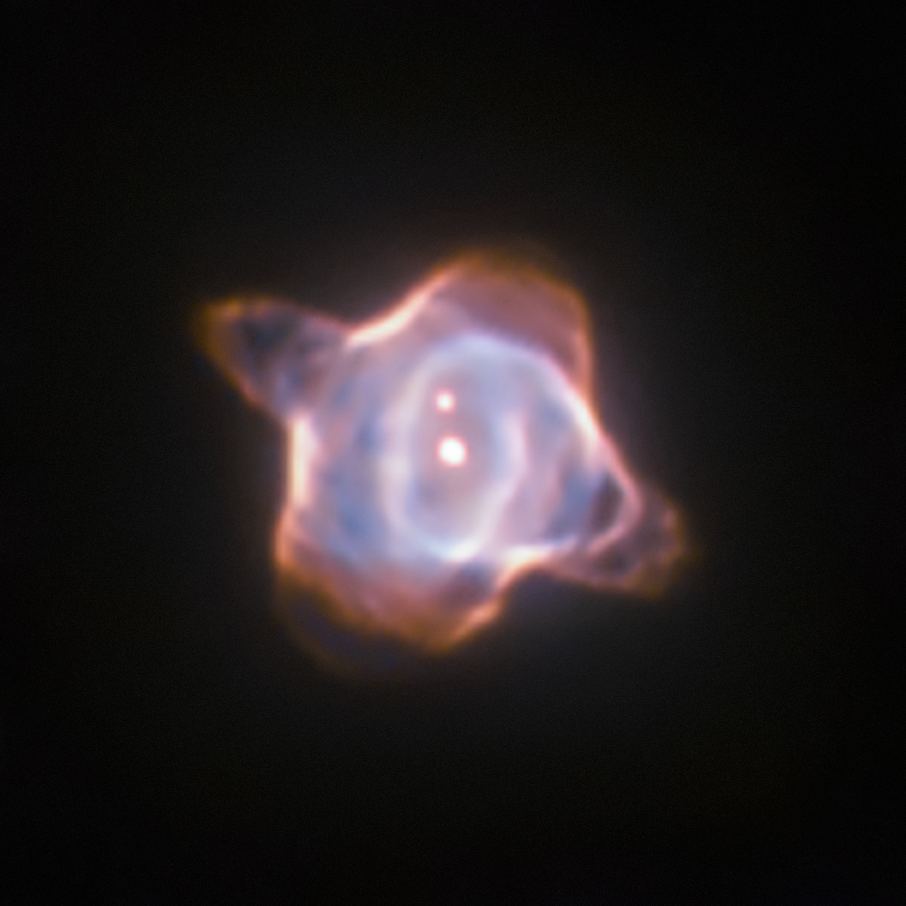

Stingray Nebula and SAO 244567

This image of the Stingray nebula, a planetary nebula 2700 light-years from Earth, was taken with the Wide Field and Planetary Camera 2 (WFPC2) in 1998. In the centre of the nebula the fast evolving star SAO 244567 is located. Observations made within the last 45 years showed that the surface temperature of the star increased by almost 40 000 degree Celsius. Now new observations of the spectra of the star have revealed that SAO 244567 has started to cool again.

Credit: ESA/Hubble & NASA